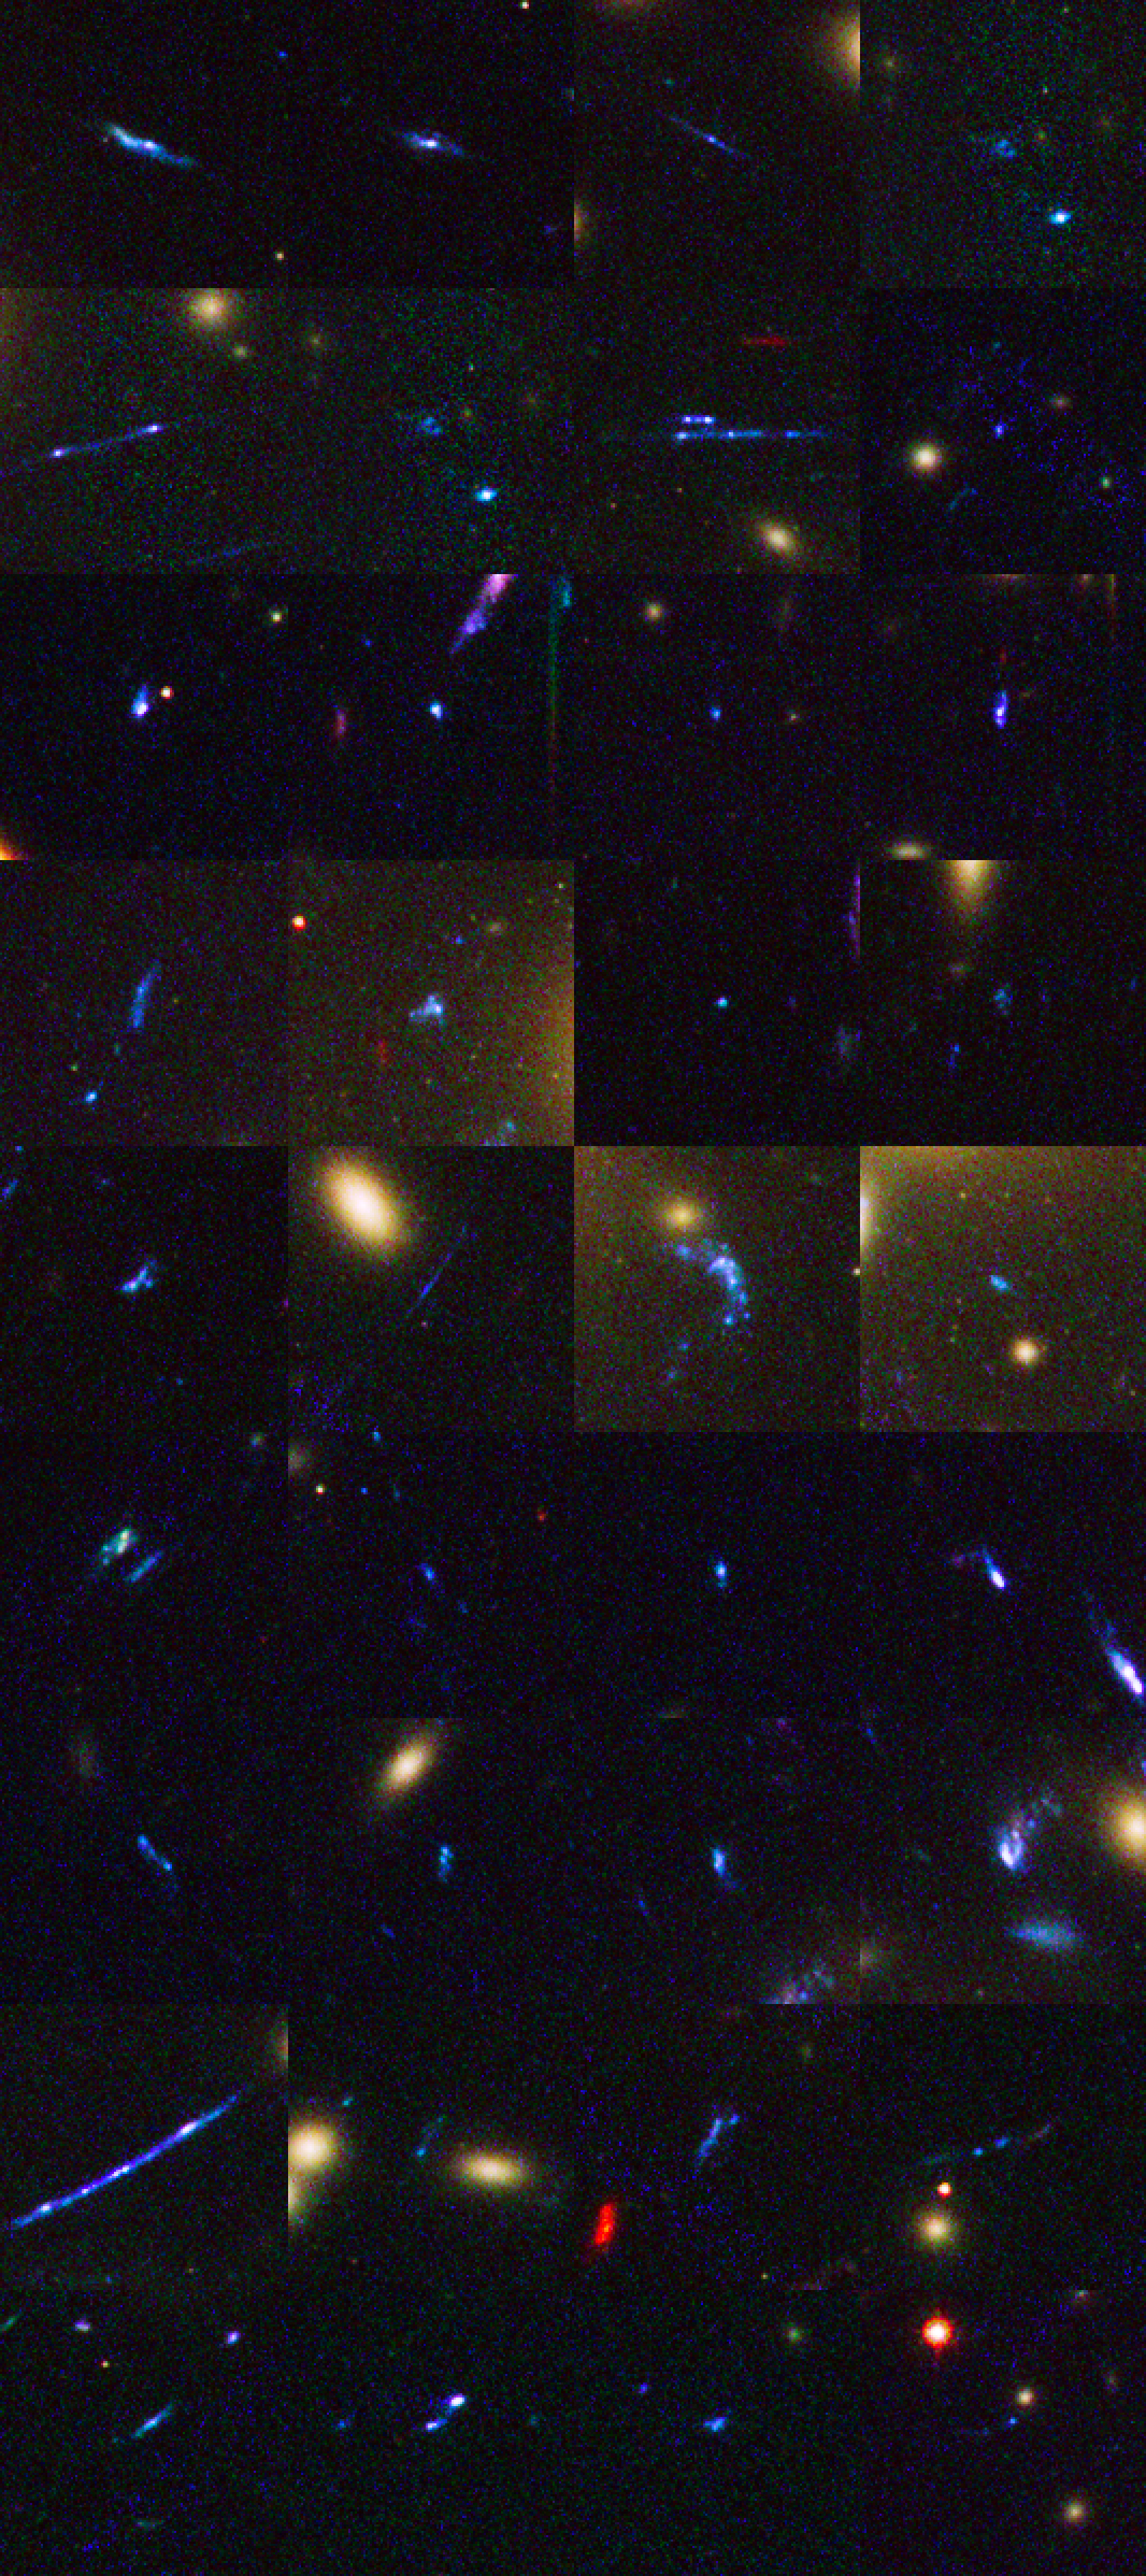

Distant galaxies behind Abell 1689

This image shows a number of distant galaxies behind the galaxy cluster Abell 1689. Astronomers have used the sharp eye of the NASA/ESA Hubble Space Telescope and the magnification power of the giant cluster to find 58 remote galaxies, which produced the bulk of new stars during the Universe's early years. They are the smallest, faintest, and most numerous galaxies ever seen in the remote Universe.

Credit: NASA, ESA, and B. Siana and A. Alavi (University of California, Riverside)